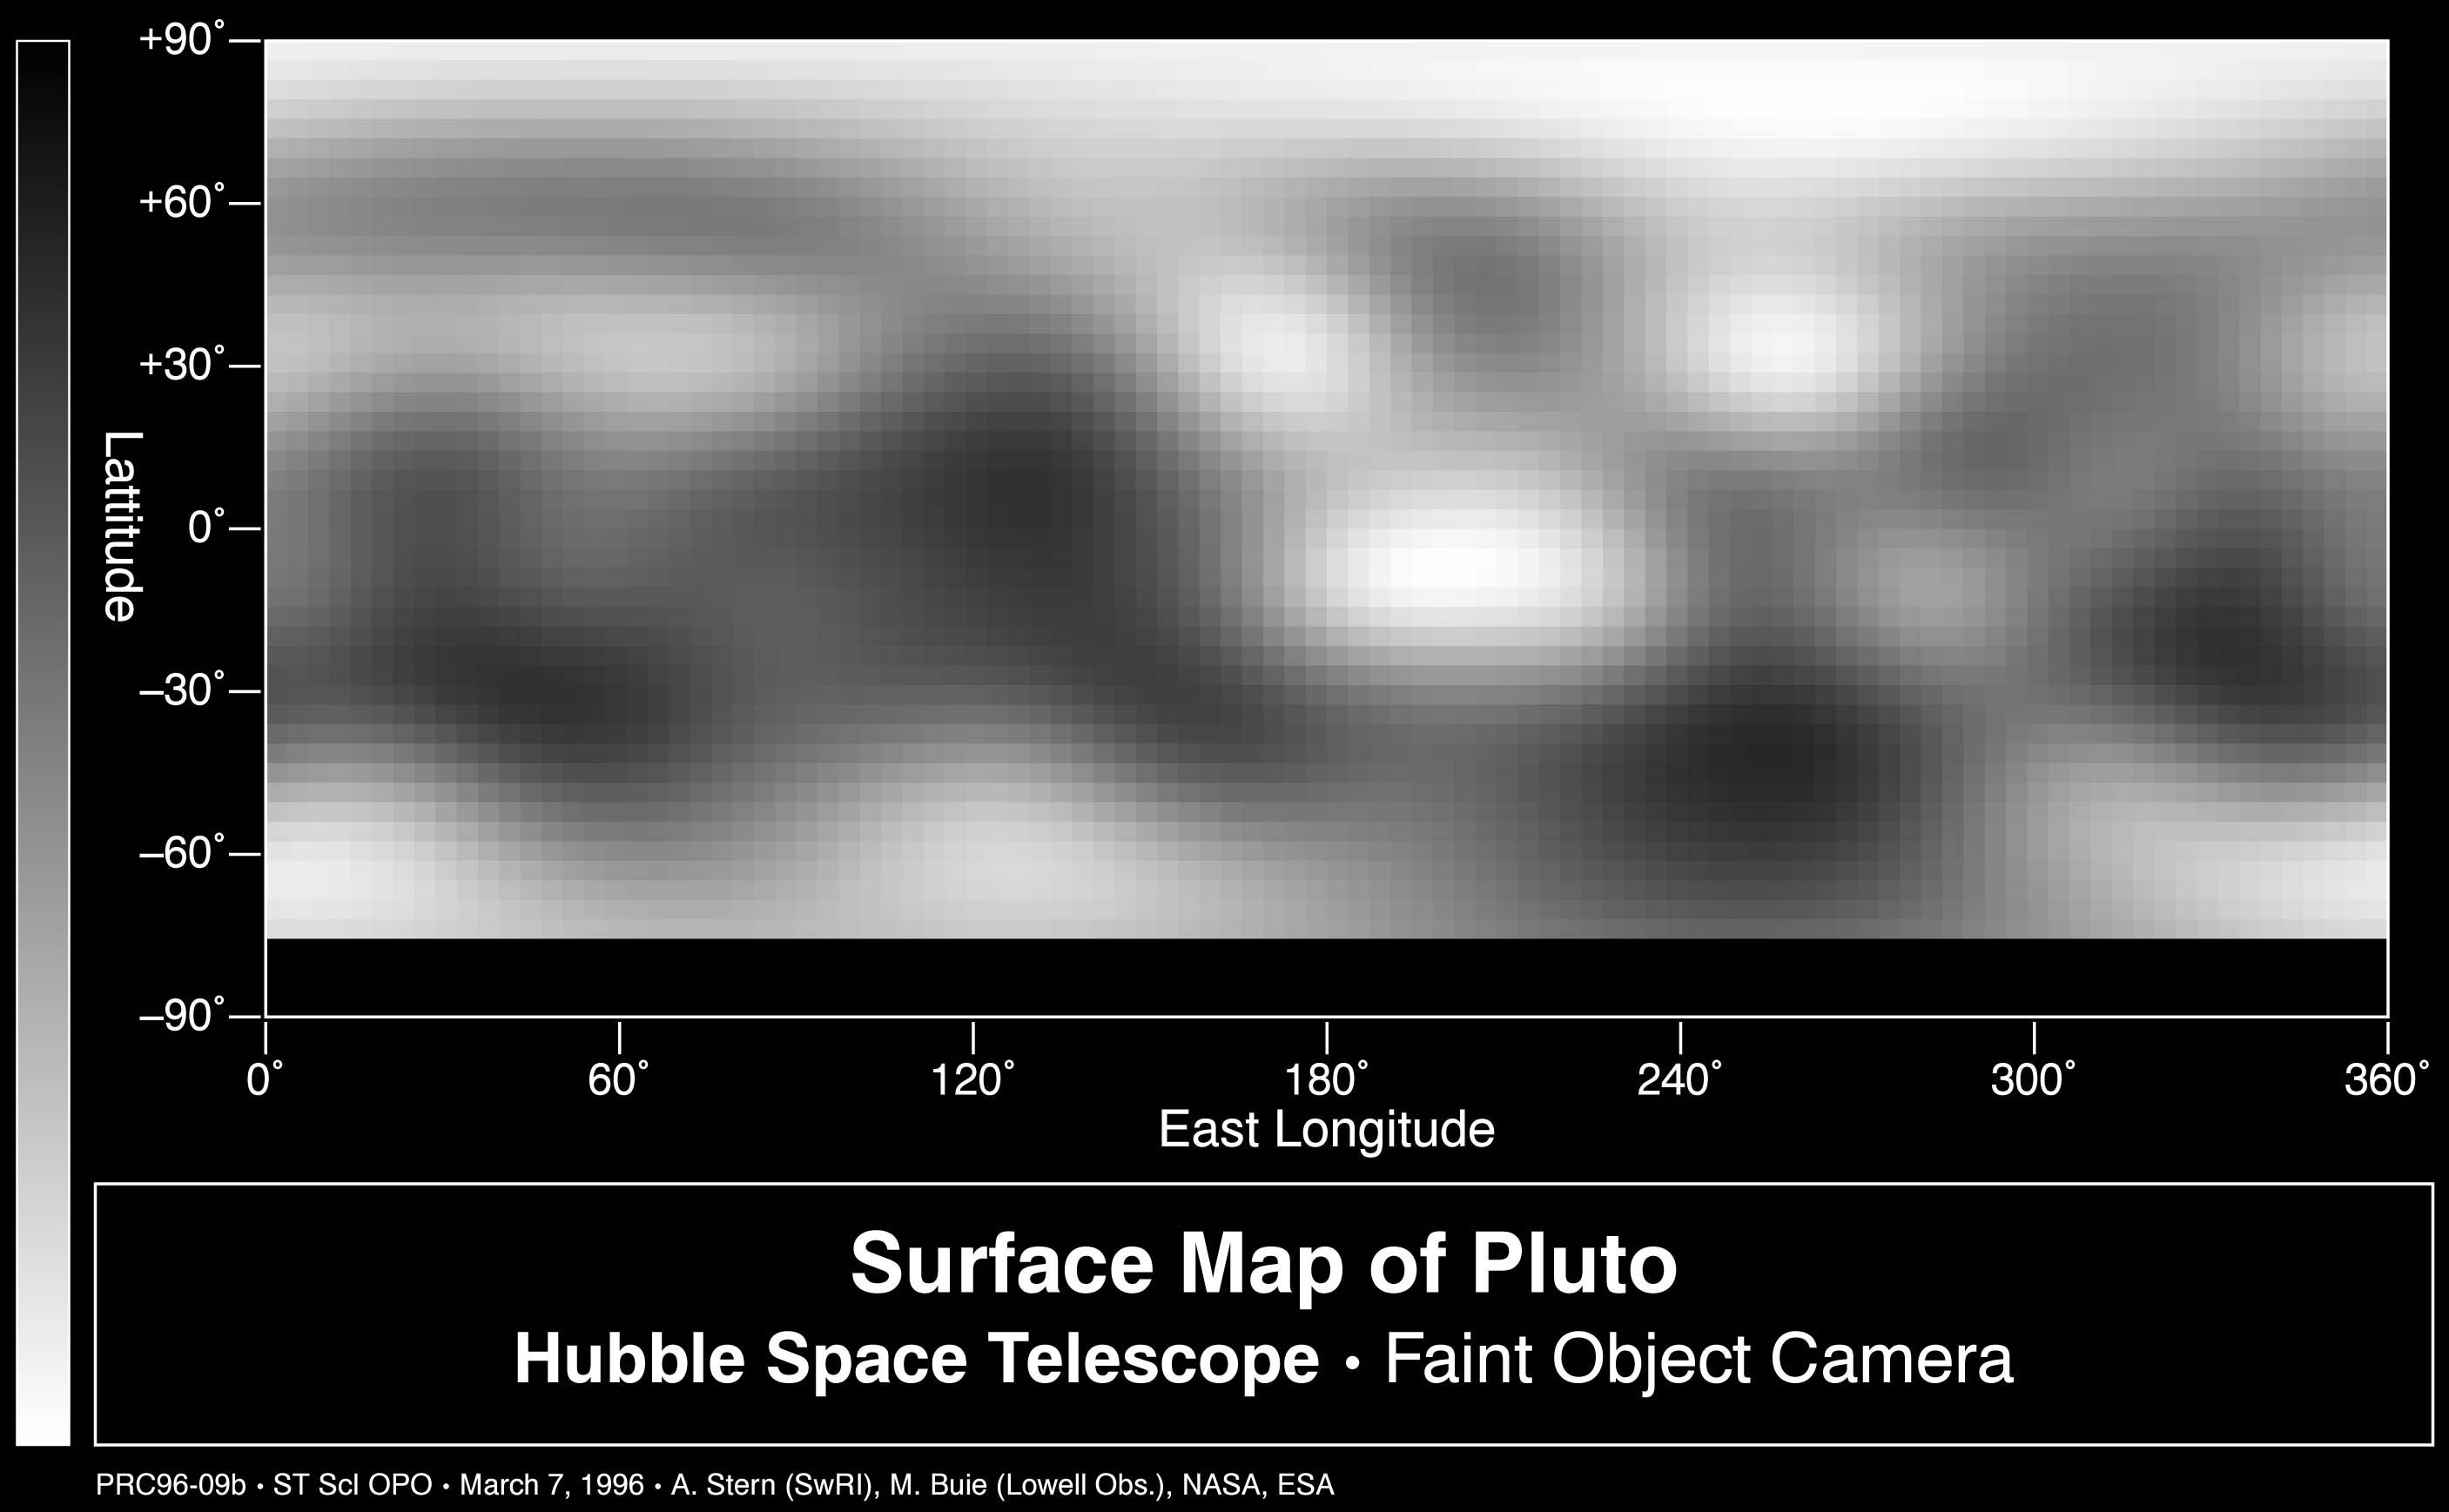

Map of Pluto's Surface

This is the first image-based surface map of the solar system's most remote planet, Pluto.

This map was assembled by computer image processing software from four separate images of Pluto's disk taken with the European Space Agency's (ESA) Faint Object Camera (FOC) aboard NASA's and ESA's Hubble Space Telescope.

Credit: Alan Stern (Southwest Research Institute), Marc Buie (Lowell Observatory), NASA and ESA